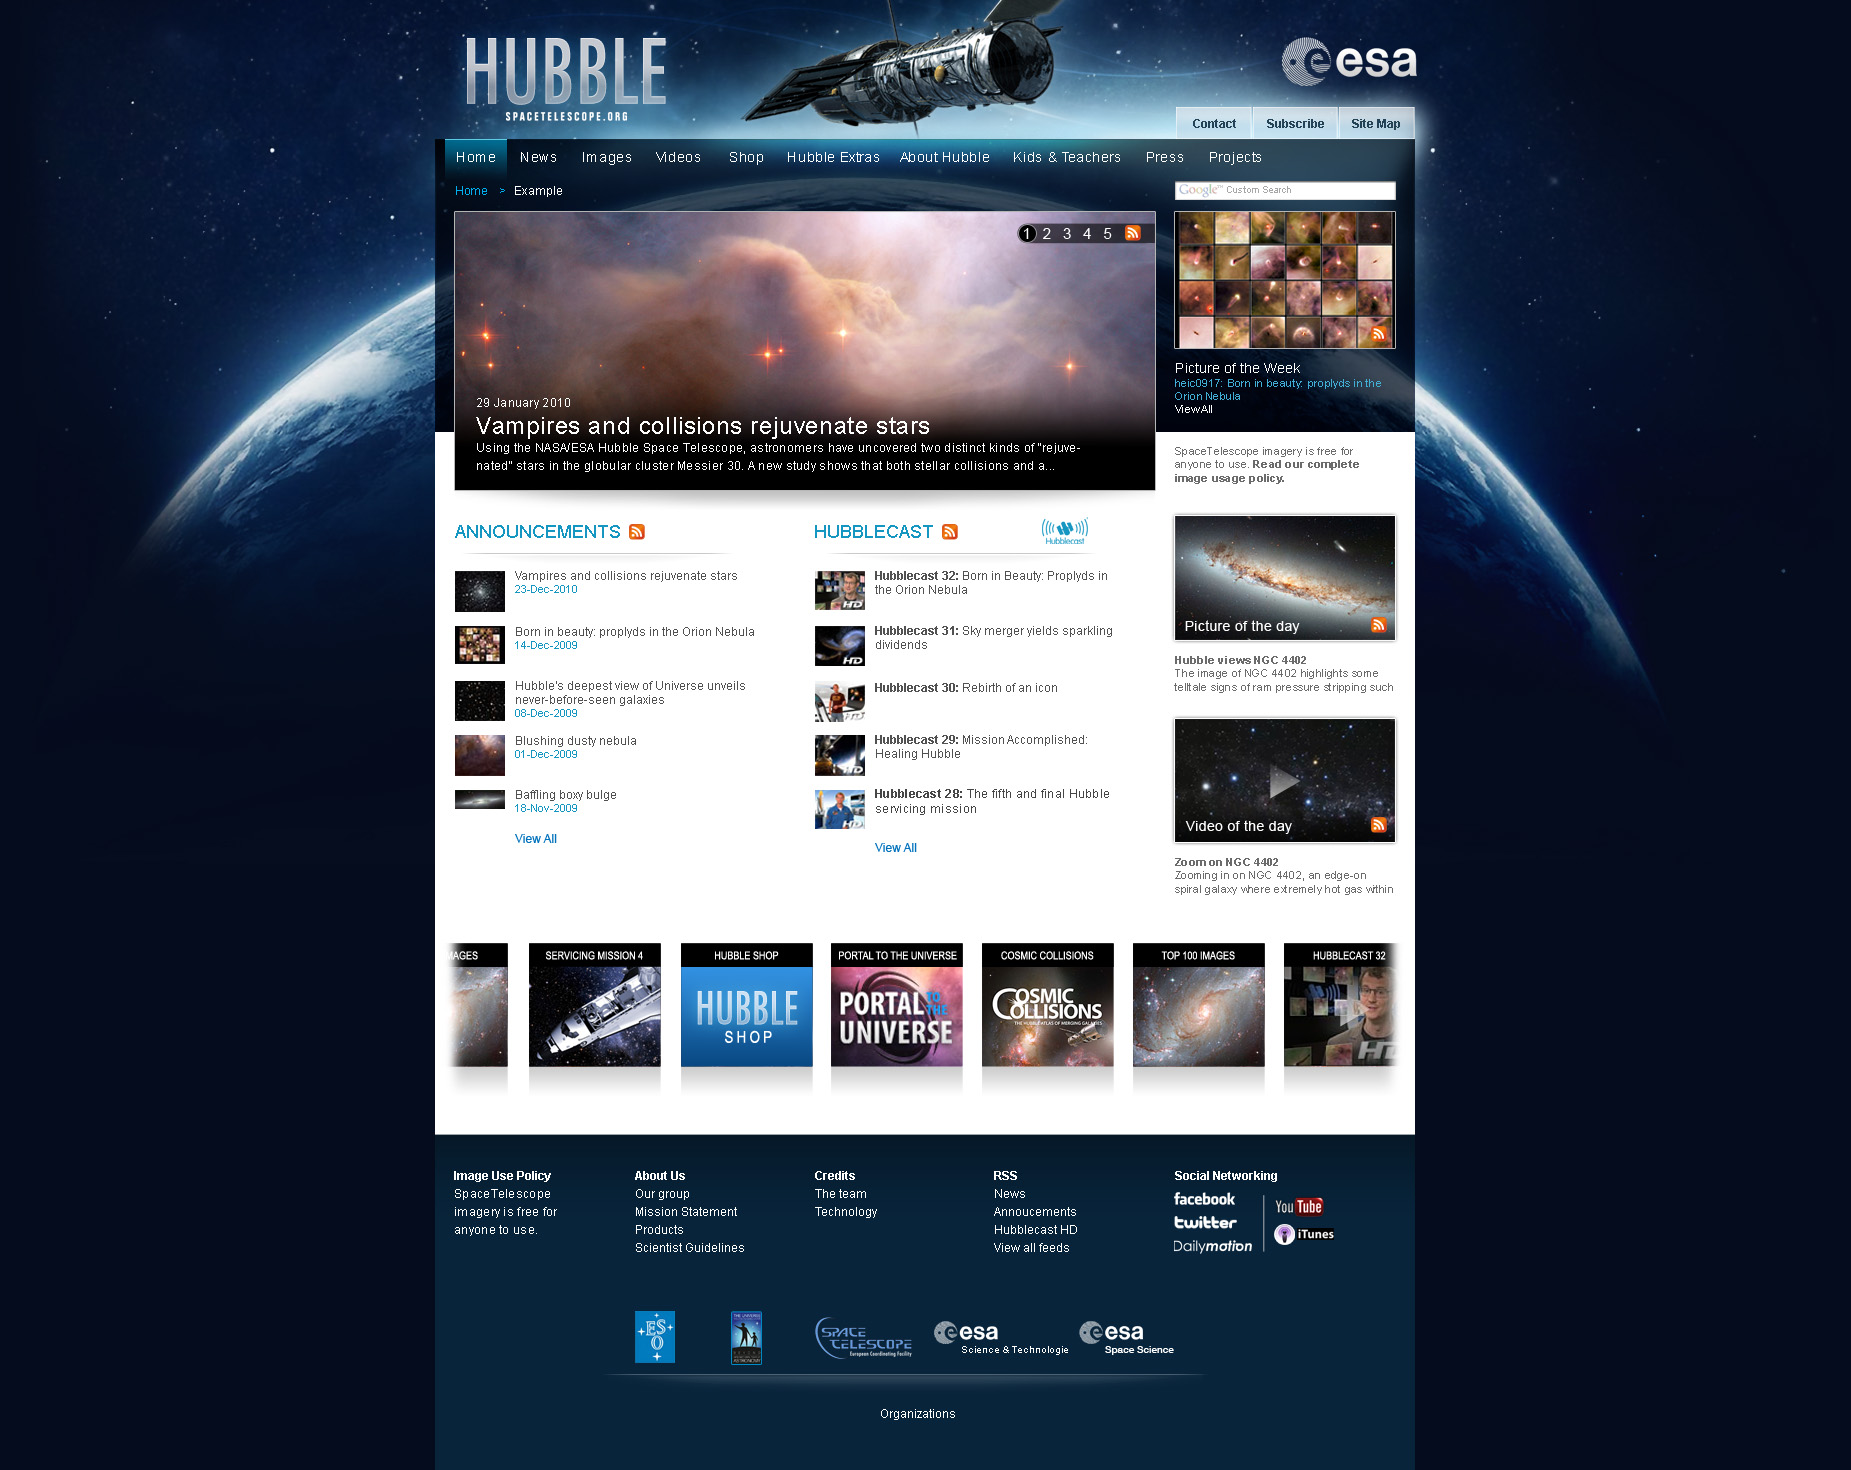

Hubble’s European website gets a facelift!

In honour of Hubble’s 20th anniversary, the European online home for Hubble is being revamped. The streamlined and contemporary new look will highlight amazing Hubble images and videos while still maintaining the convenient and easy-to-use features of the previous site. The new site will also include brand-new elements including Hubble pictures of the week.

Check out the cool new look, debuting on 23 April: http://www.spacetelescope.org

Credit: NASA & ESA